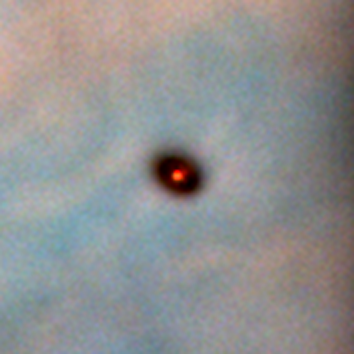

Protoplanetary disc in the Orion Nebula

Disks around young stars (also known as circumstellar or protoplanetary disks) are thought to be made up of 99% gas and 1% dust. Even that small amount of dust is enough to make the disks opaque and dark at visible wavelengths. The dark disk is seen in this image because they are silhouetted against the bright backdrop of the hot gas of the Orion nebula.

Credit: Mark McCaughrean (Max-Planck-Institute for Astronomy), C. Robert O'Dell (Rice University), and NASA/ESA